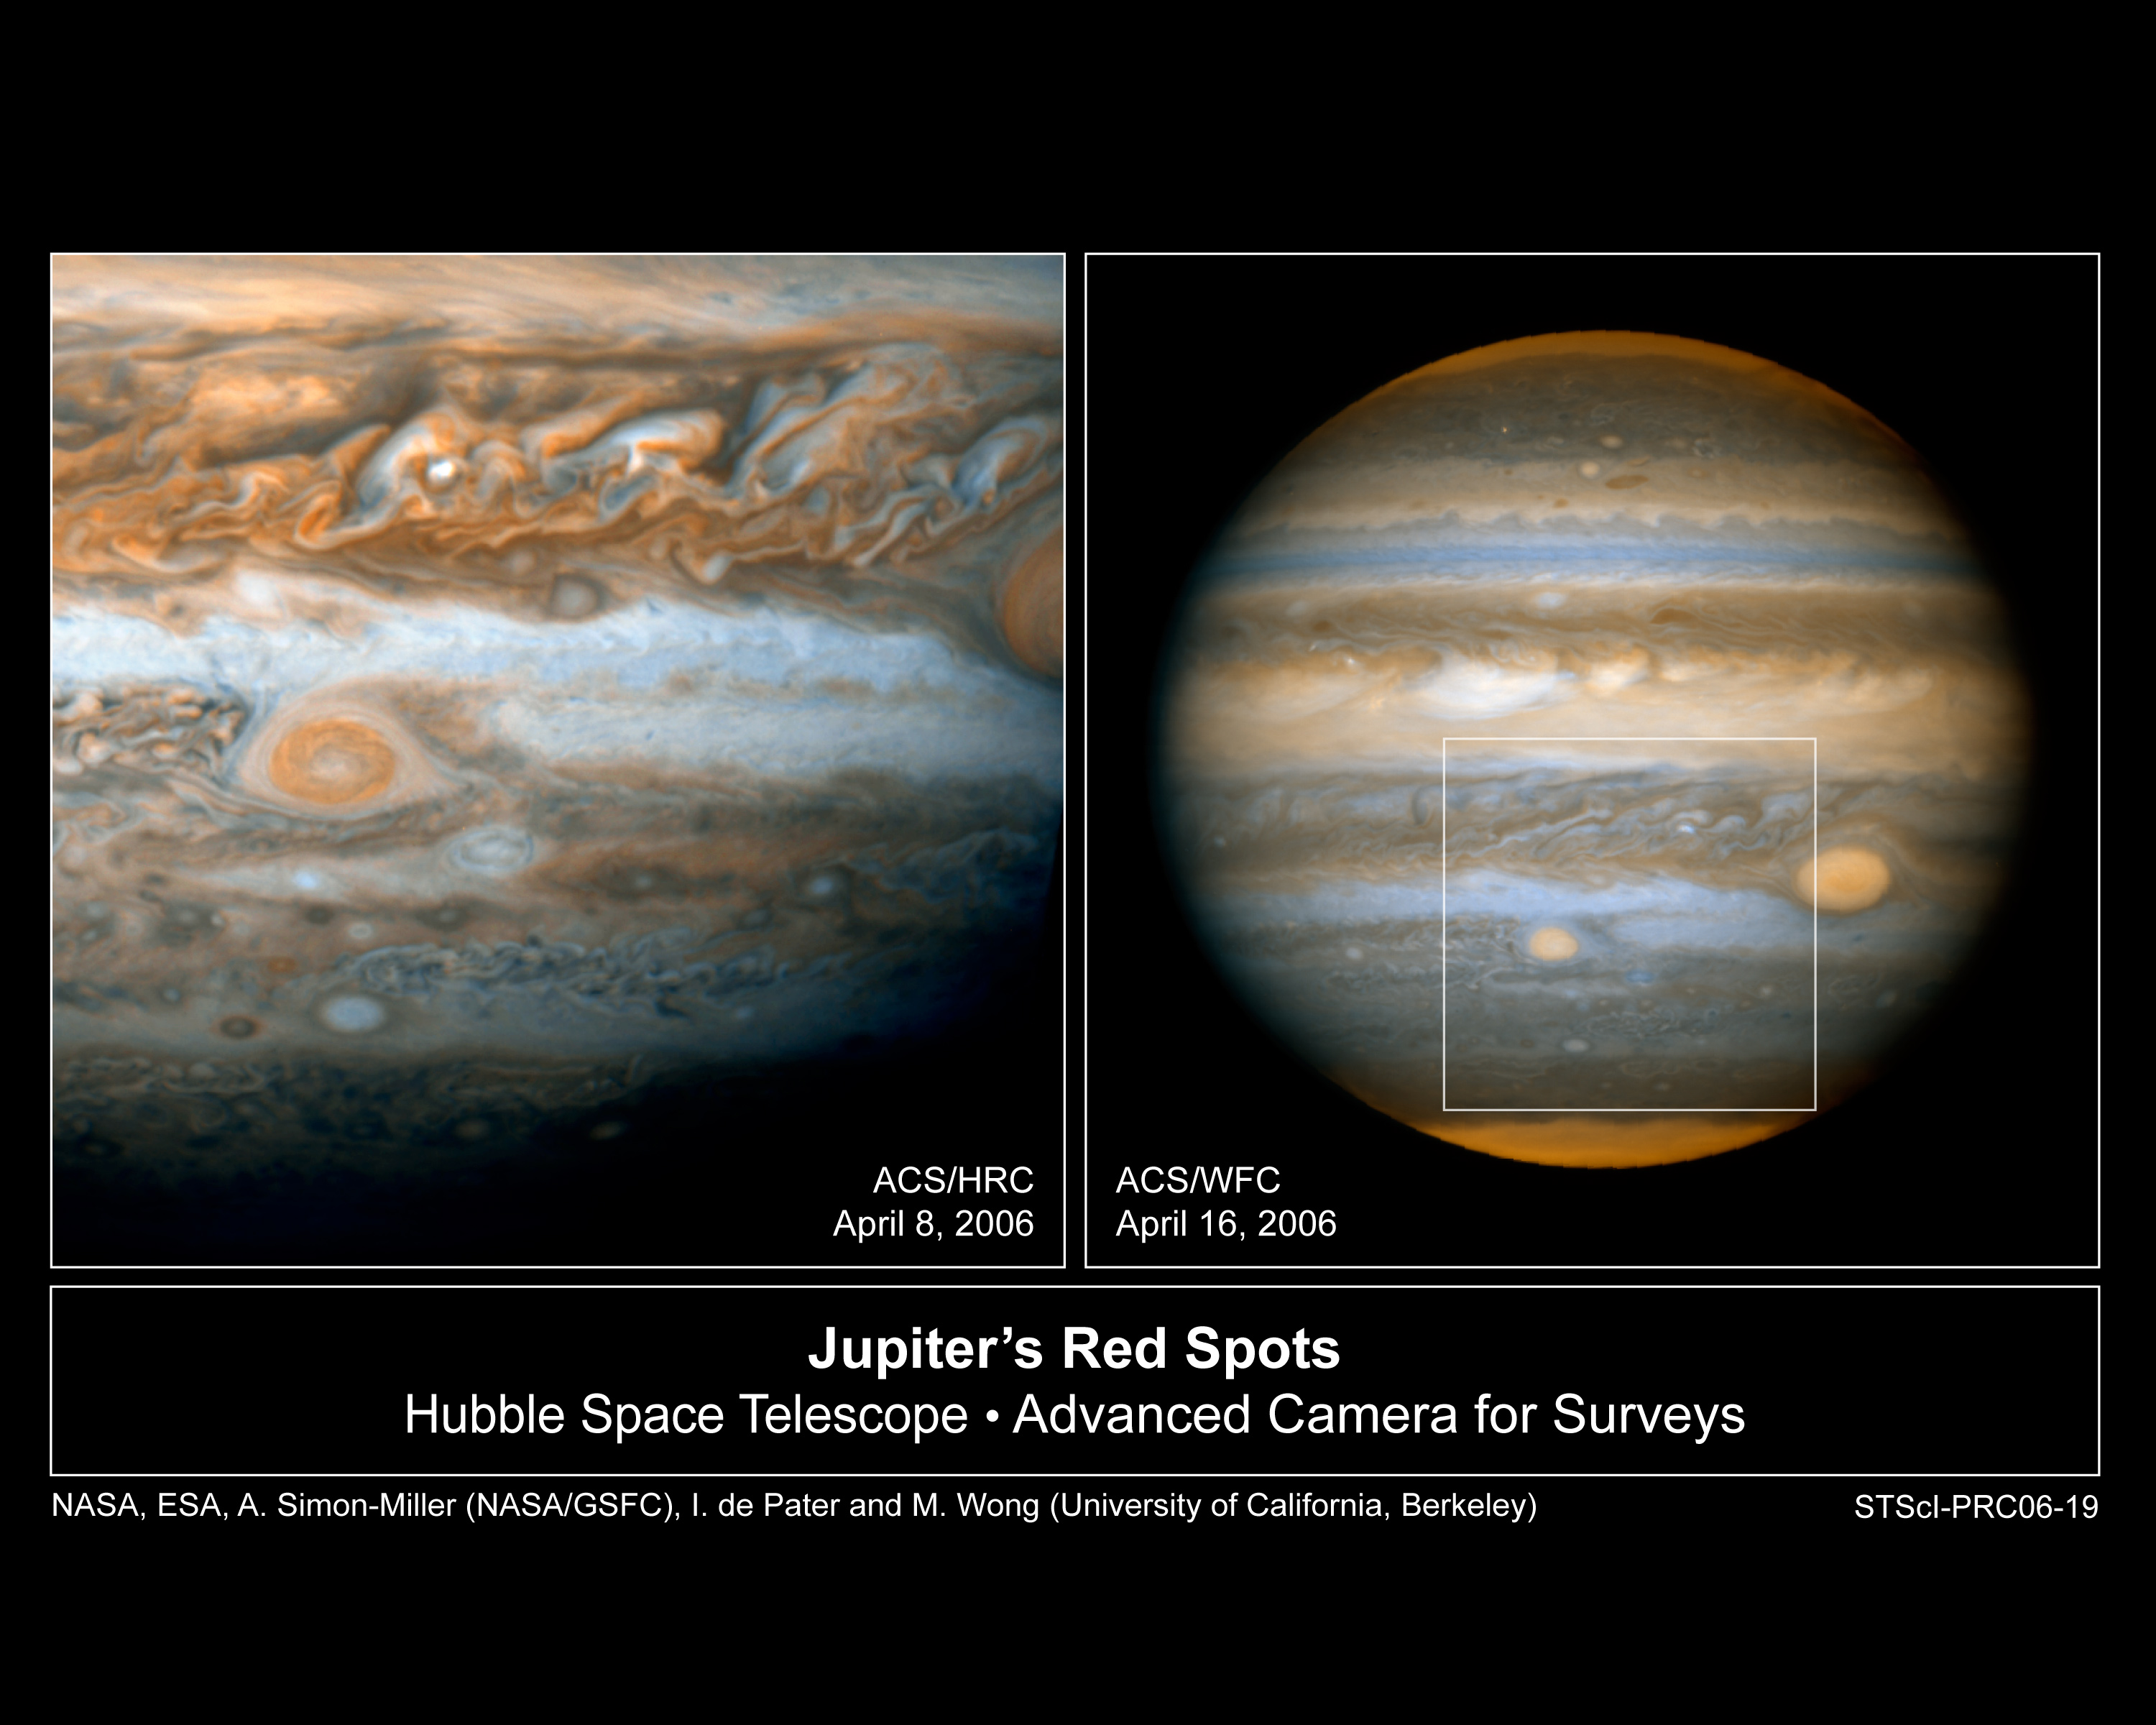

Hubble Snaps Baby Pictures of Jupiter's "Red Spot Jr."

The NASA/ESA Hubble Space Telescope is giving astronomers their most detailed view yet of a second red spot emerging on Jupiter. For the first time in history, astronomers have witnessed the birth of a new red spot on the giant planet, which is located half a billion miles away (about 800 thousand kilometres). The storm is roughly one-half the diameter of its bigger and legendary cousin, the Great Red Spot. Researchers suggest that the new spot may be related to a possible major climate change in Jupiter's atmosphere.

Credit: NASA, ESA, A. Simon-Miller (NASA/GSFC), and I. de Pater (University of California Berkeley)